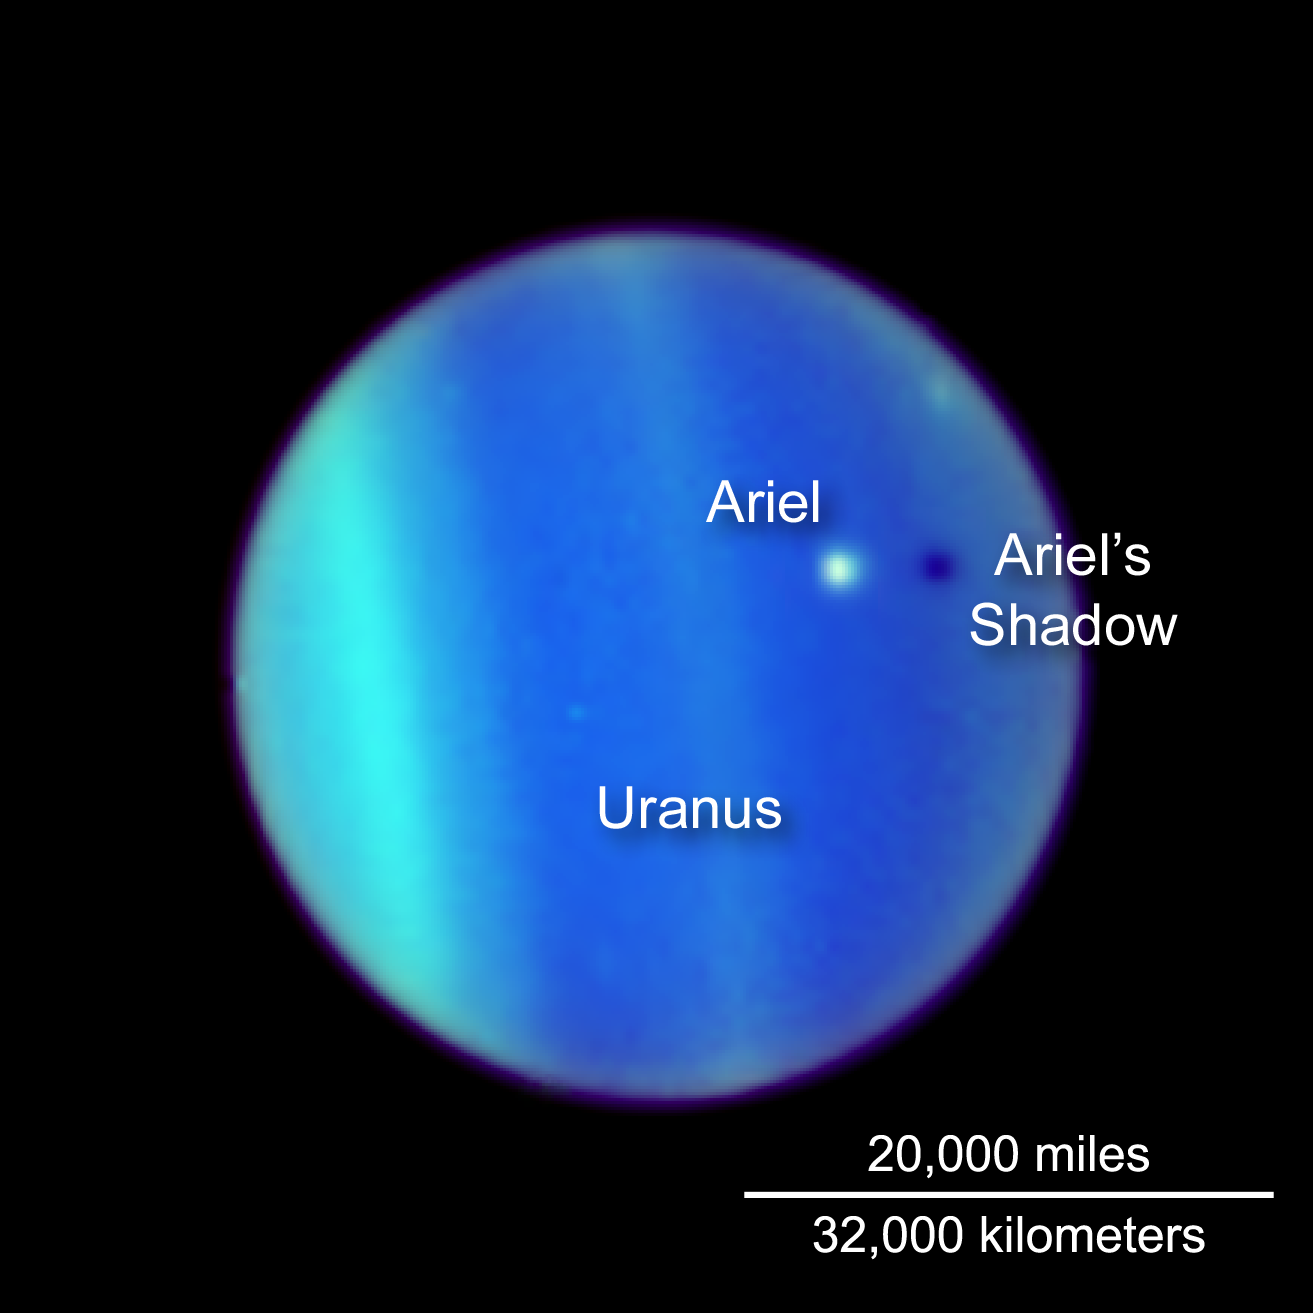

Uranus as Viewed from Earth - 1994, 1997, 2006

This NASA Hubble Space Telescope image is a never-before-seen astronomical alignment of a moon traversing the face of Uranus, and its accompanying shadow. The white dot near the center of Uranus’ blue-green disk is the icy moon Ariel.

Credit: NASA, ESA, L. Sromovsky (University of Wisconsin, Madison), H. Hammel (Space Science Institute), and K. Rages (SETI)